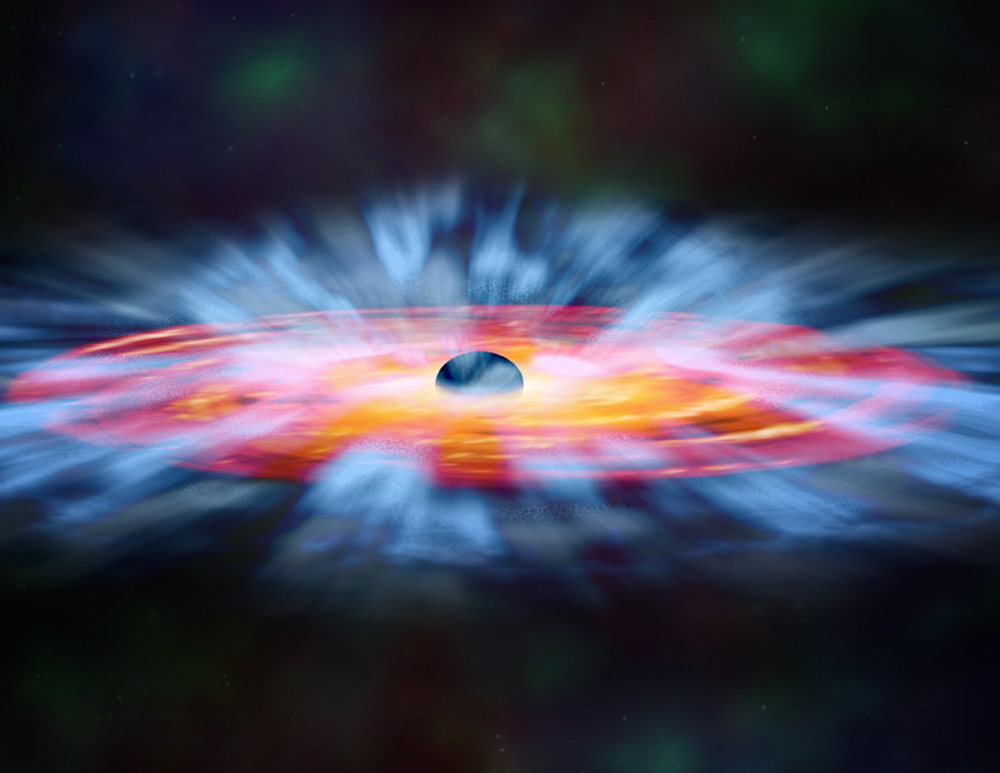

Black hole outflows (artist’s impression)

In this artist’s illustration, turbulent winds of gas swirl around a black hole. Some of the gas is spiralling inward towards the black hole, while some is blown away.

Credit: NASA and M. Weiss (Chandra X-ray Center)